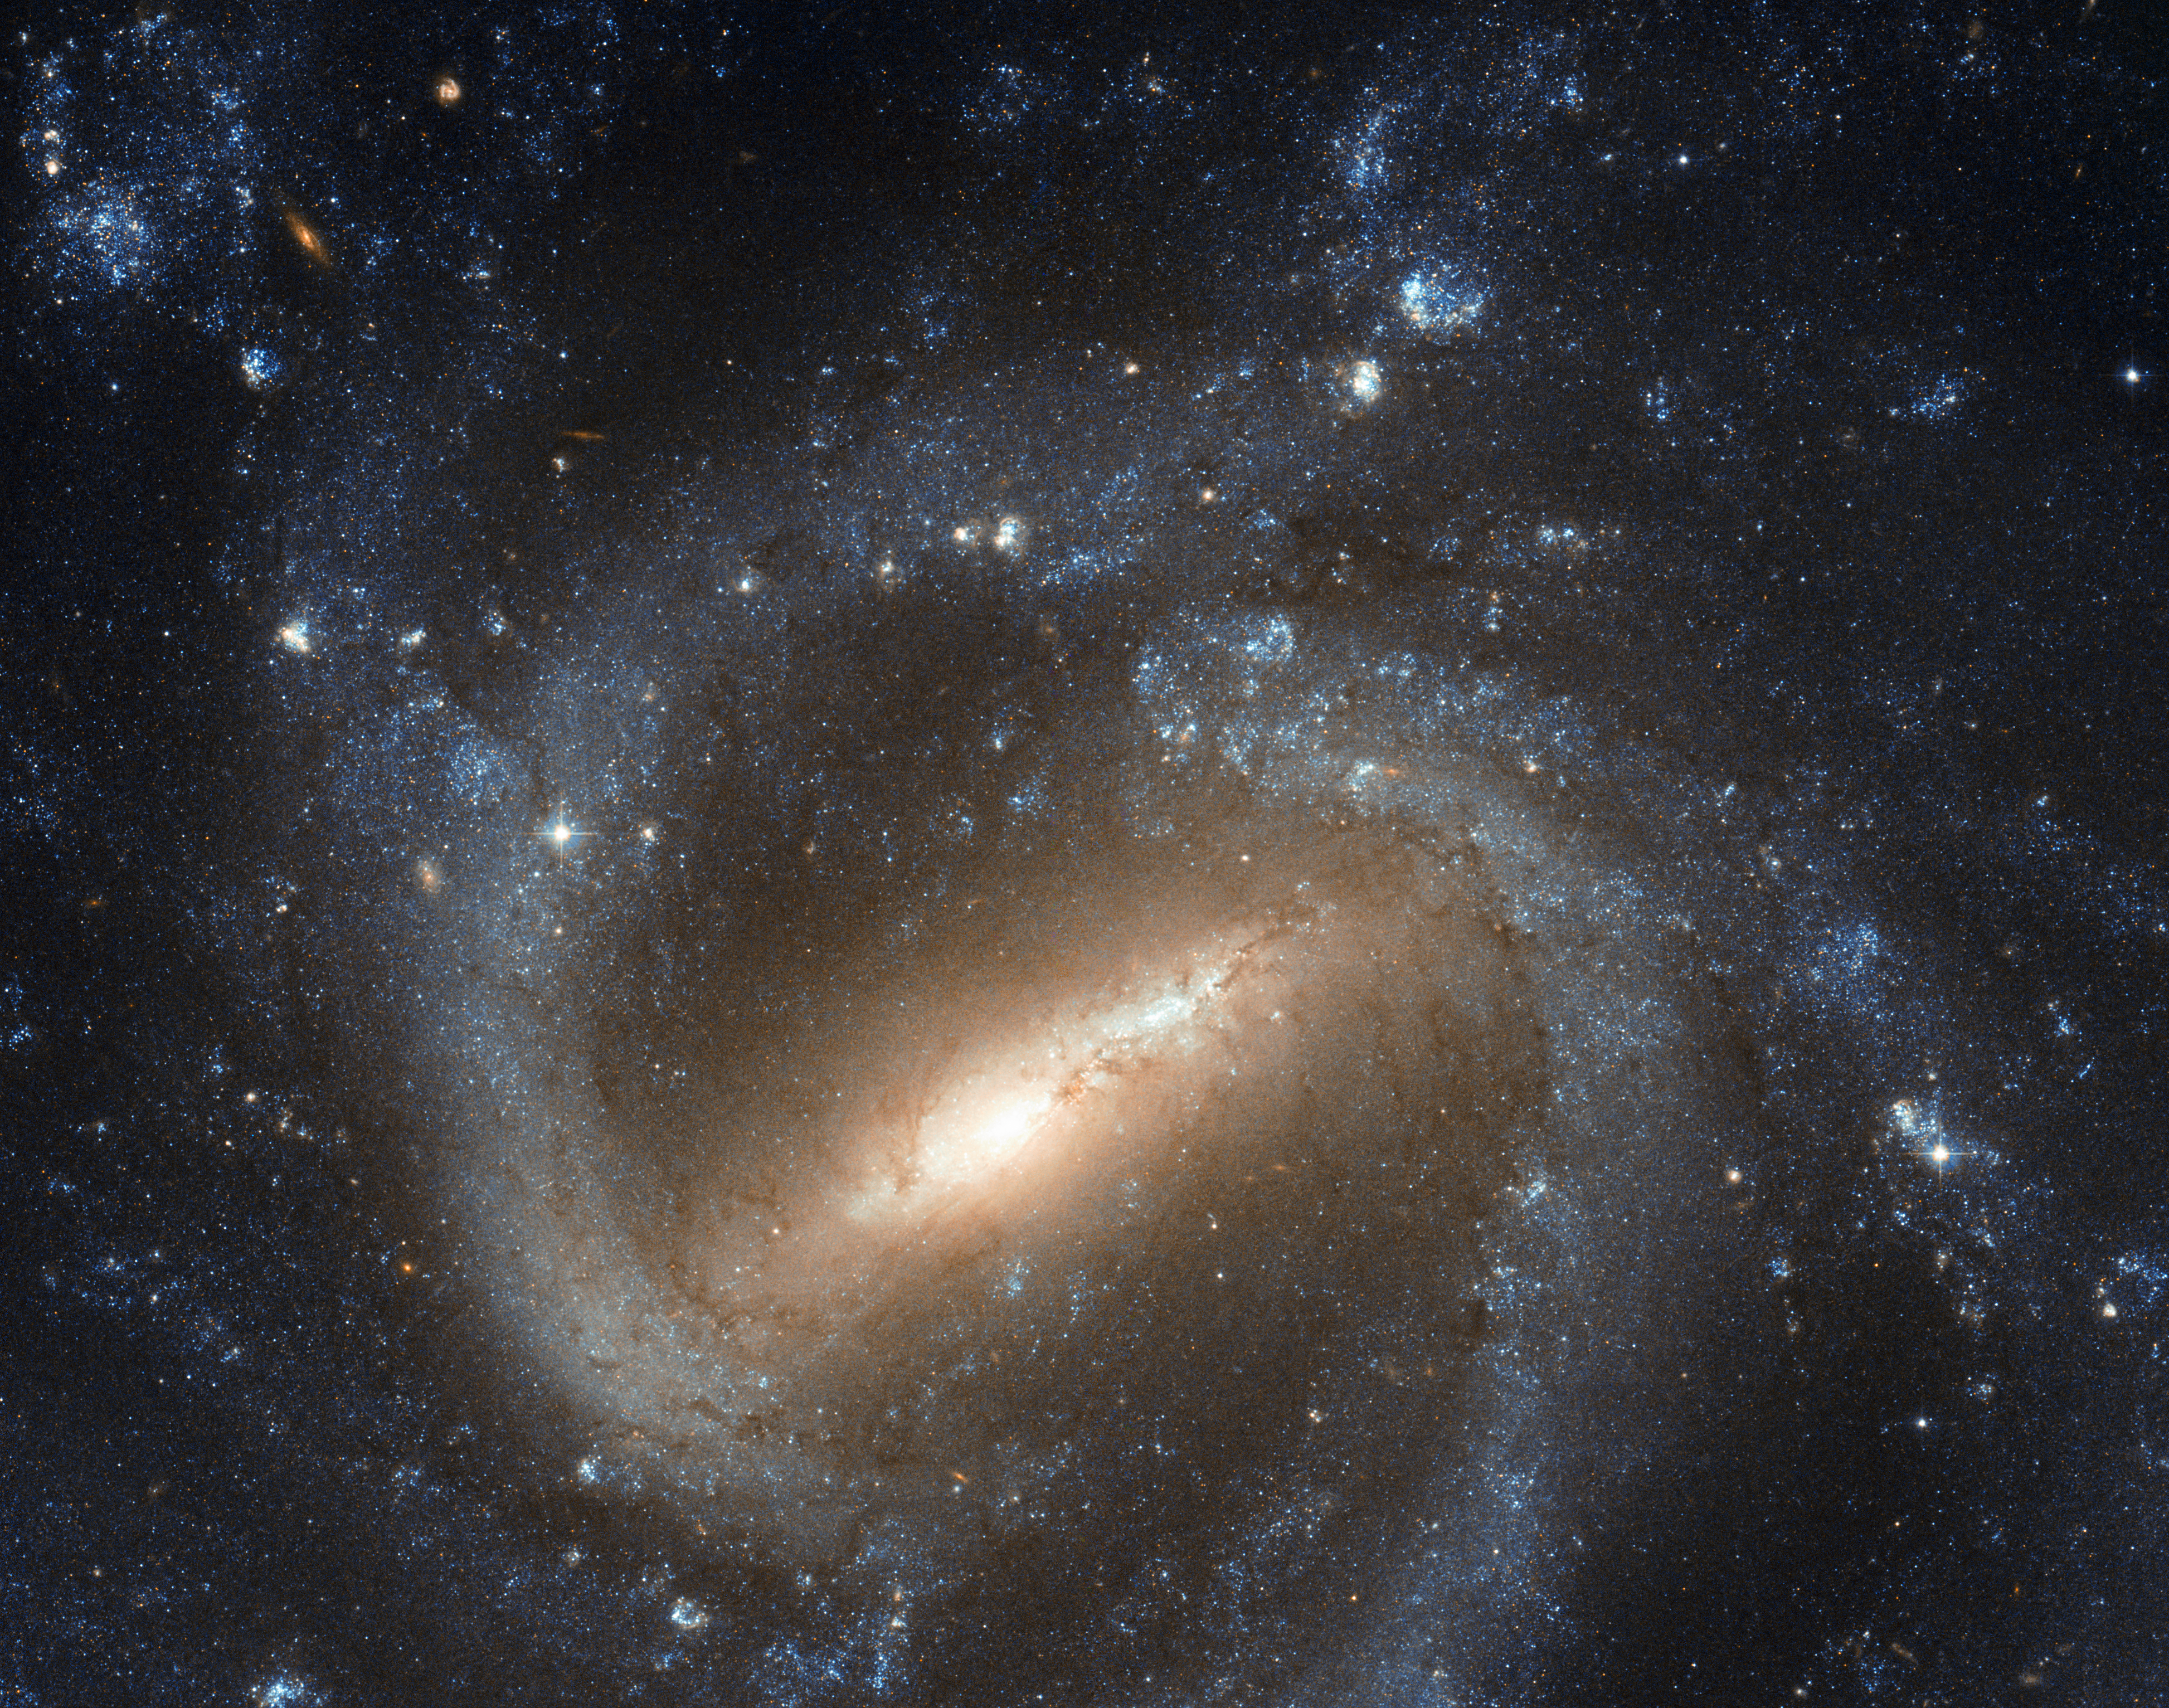

Hubble image of NGC 1073

The NASA/ESA Hubble Space Telescope has taken a picture of the barred spiral galaxy NGC 1073, which is found in the constellation of Cetus (The Sea Monster). Our own galaxy, the Milky Way, is thought to be a similar barred spiral, and the study of galaxies such as NGC 1073 can help astronomers learn more about our celestial home.

Credit: NASA & ESA